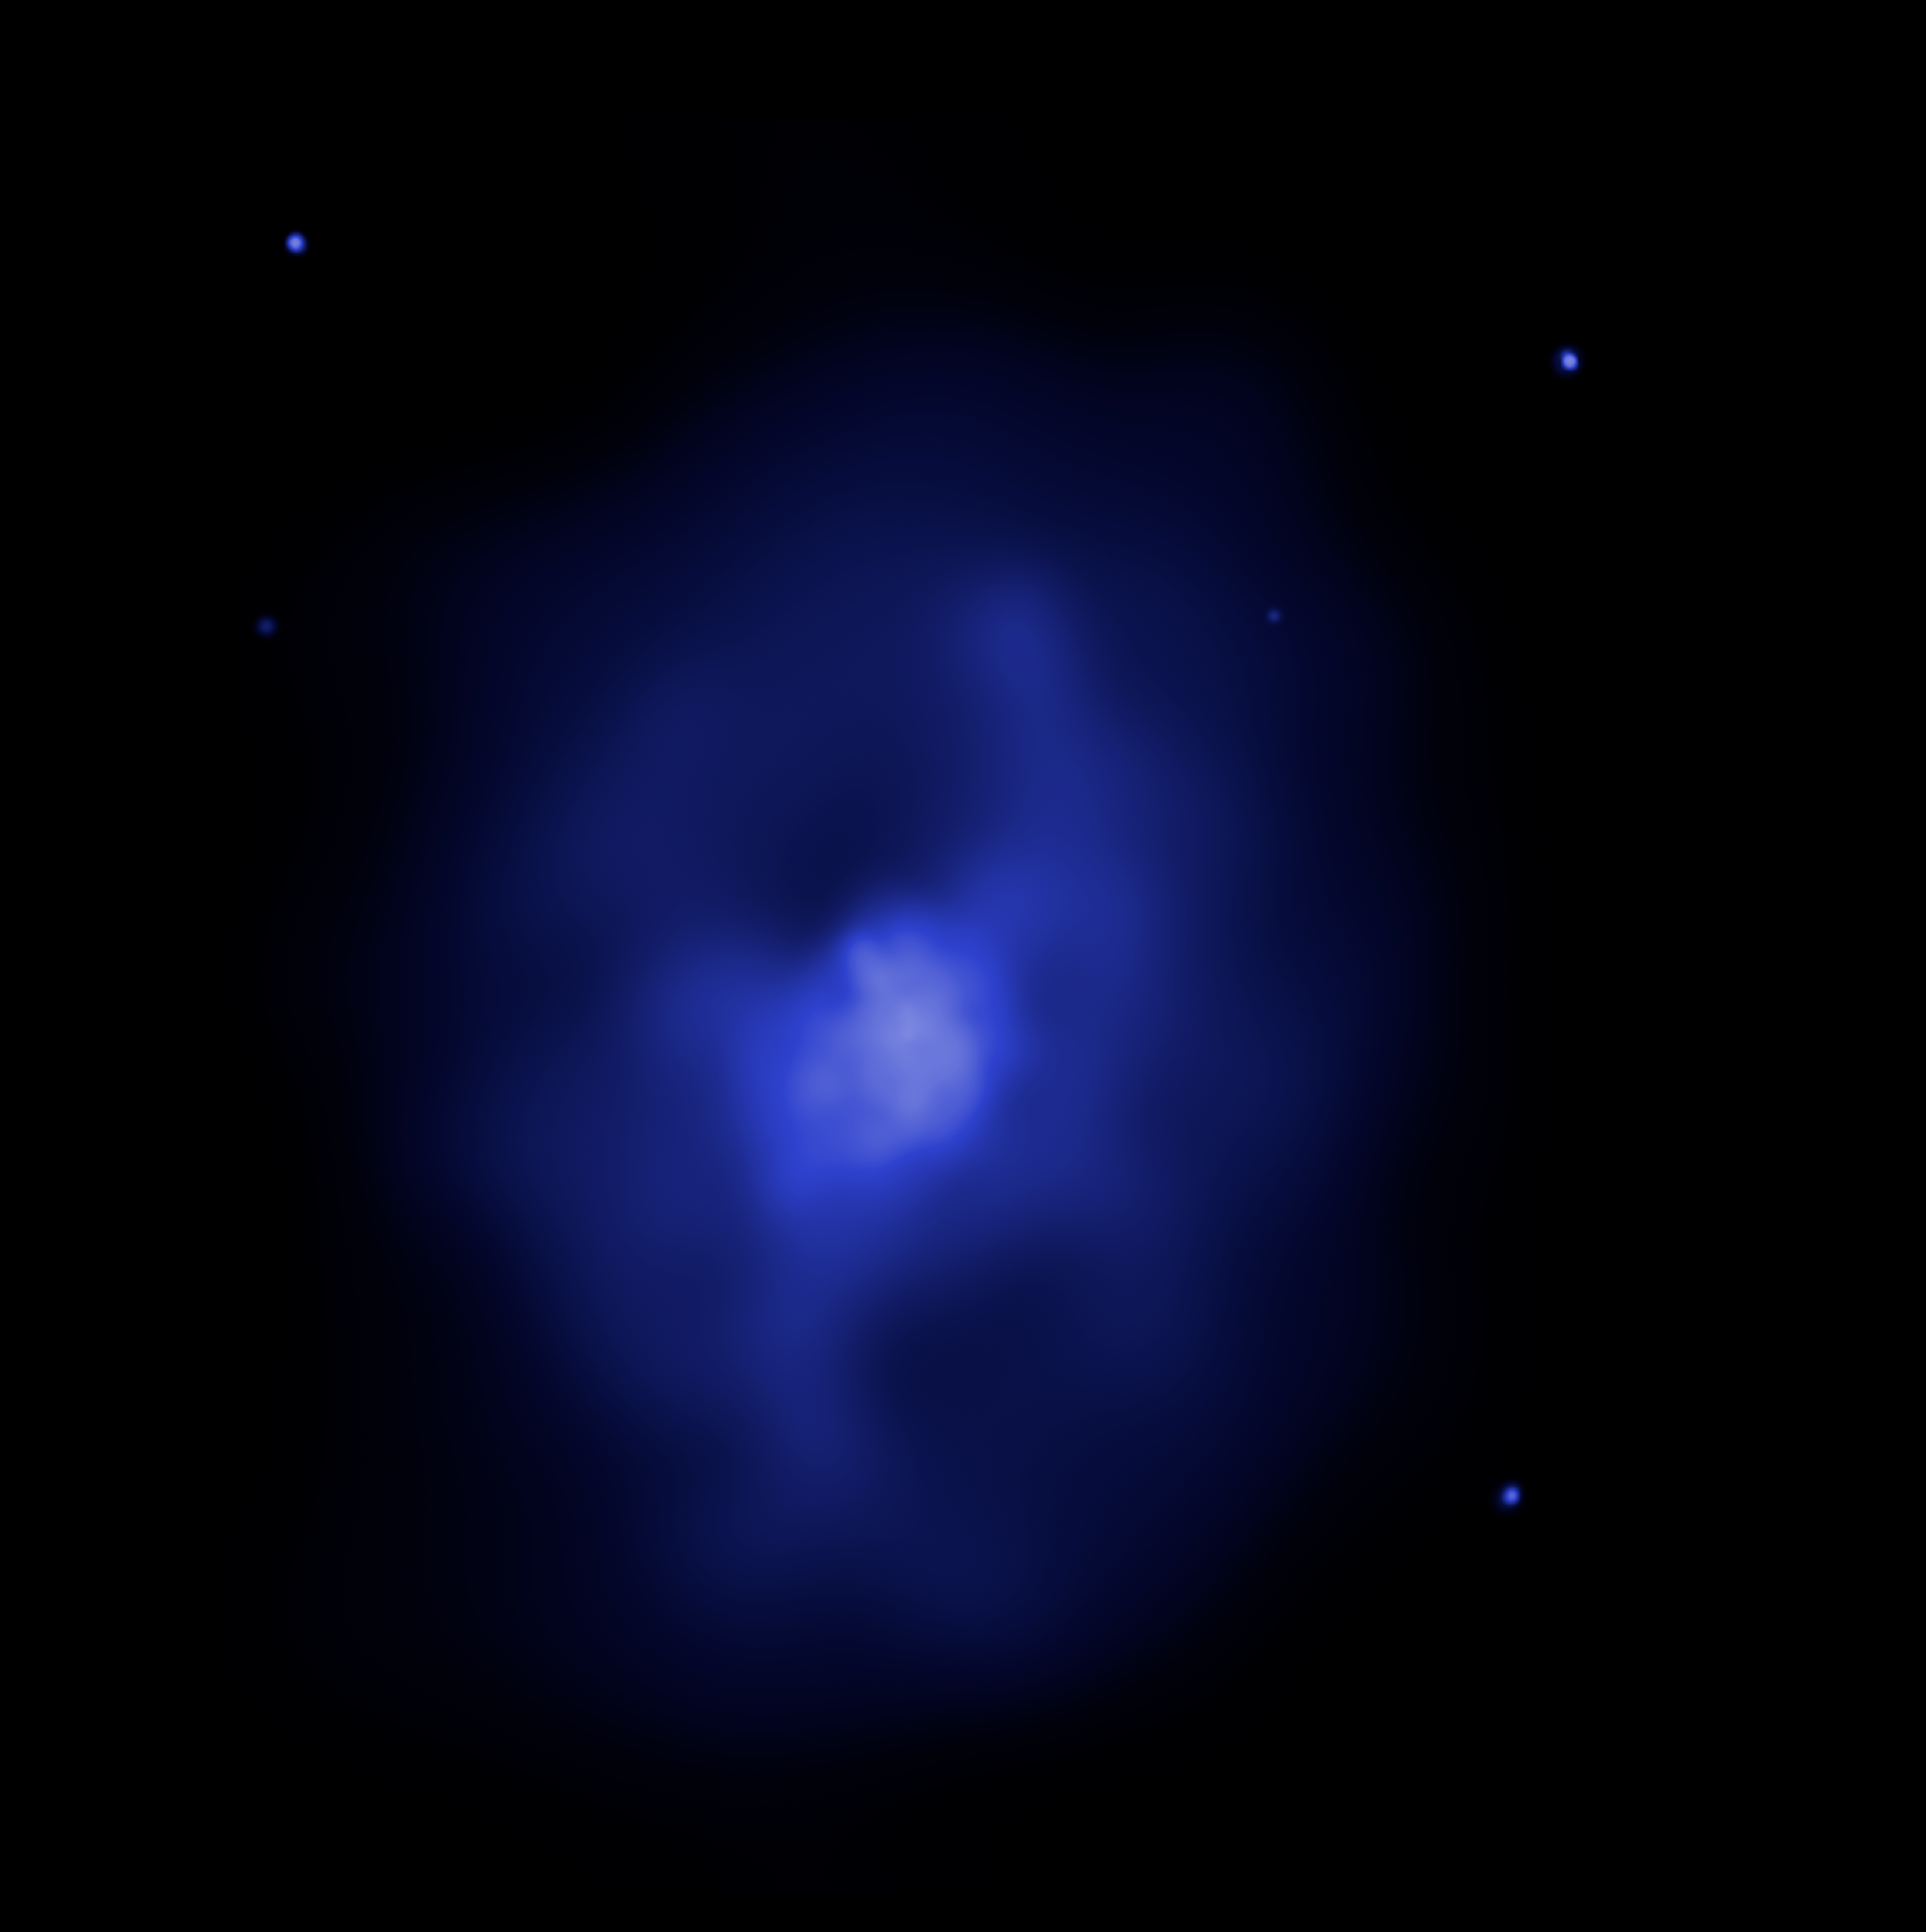

X-ray Image of Galaxy Cluster MS 0735

This image of galaxy cluster MS 0735.6+7421 was taken by the Chandra X-ray Observatory in November 2003. Diffuse, hot gas with a temperature of nearly 50 million degrees permeates the space between the galaxies in the cluster. The gas emits X-rays, which are seen as blue in this image. Enormous holes or cavities in the gas, each roughly 640,000 light-years in diameter - nearly seven times the diameter of the Milky Way are seen in the image. The cavities were created by jets of charged particles ejected at nearly light speed from a supermassive black hole weighing nearly a billion times the mass of our Sun, which lurks in the nucleus of the bright central galaxy.

Credit: NASA/CXC, B. McNamara (University of Waterloo and Ohio University)